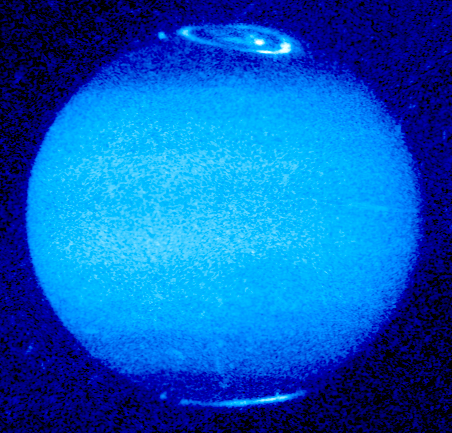

Jupiter's Aurora

This ultraviolet images shows how the auroral emissions change in brightness and structure as Jupiter rotates.

It also reveals how the magnetic field is offset from Jupiter's spin axis by 10 to 15 degrees.

Credit: John T. Clarke and Gilda E. Ballester (University of Michigan), John Trauger and Robin Evans (Jet Propulsion Laboratory), and NASA/ESA